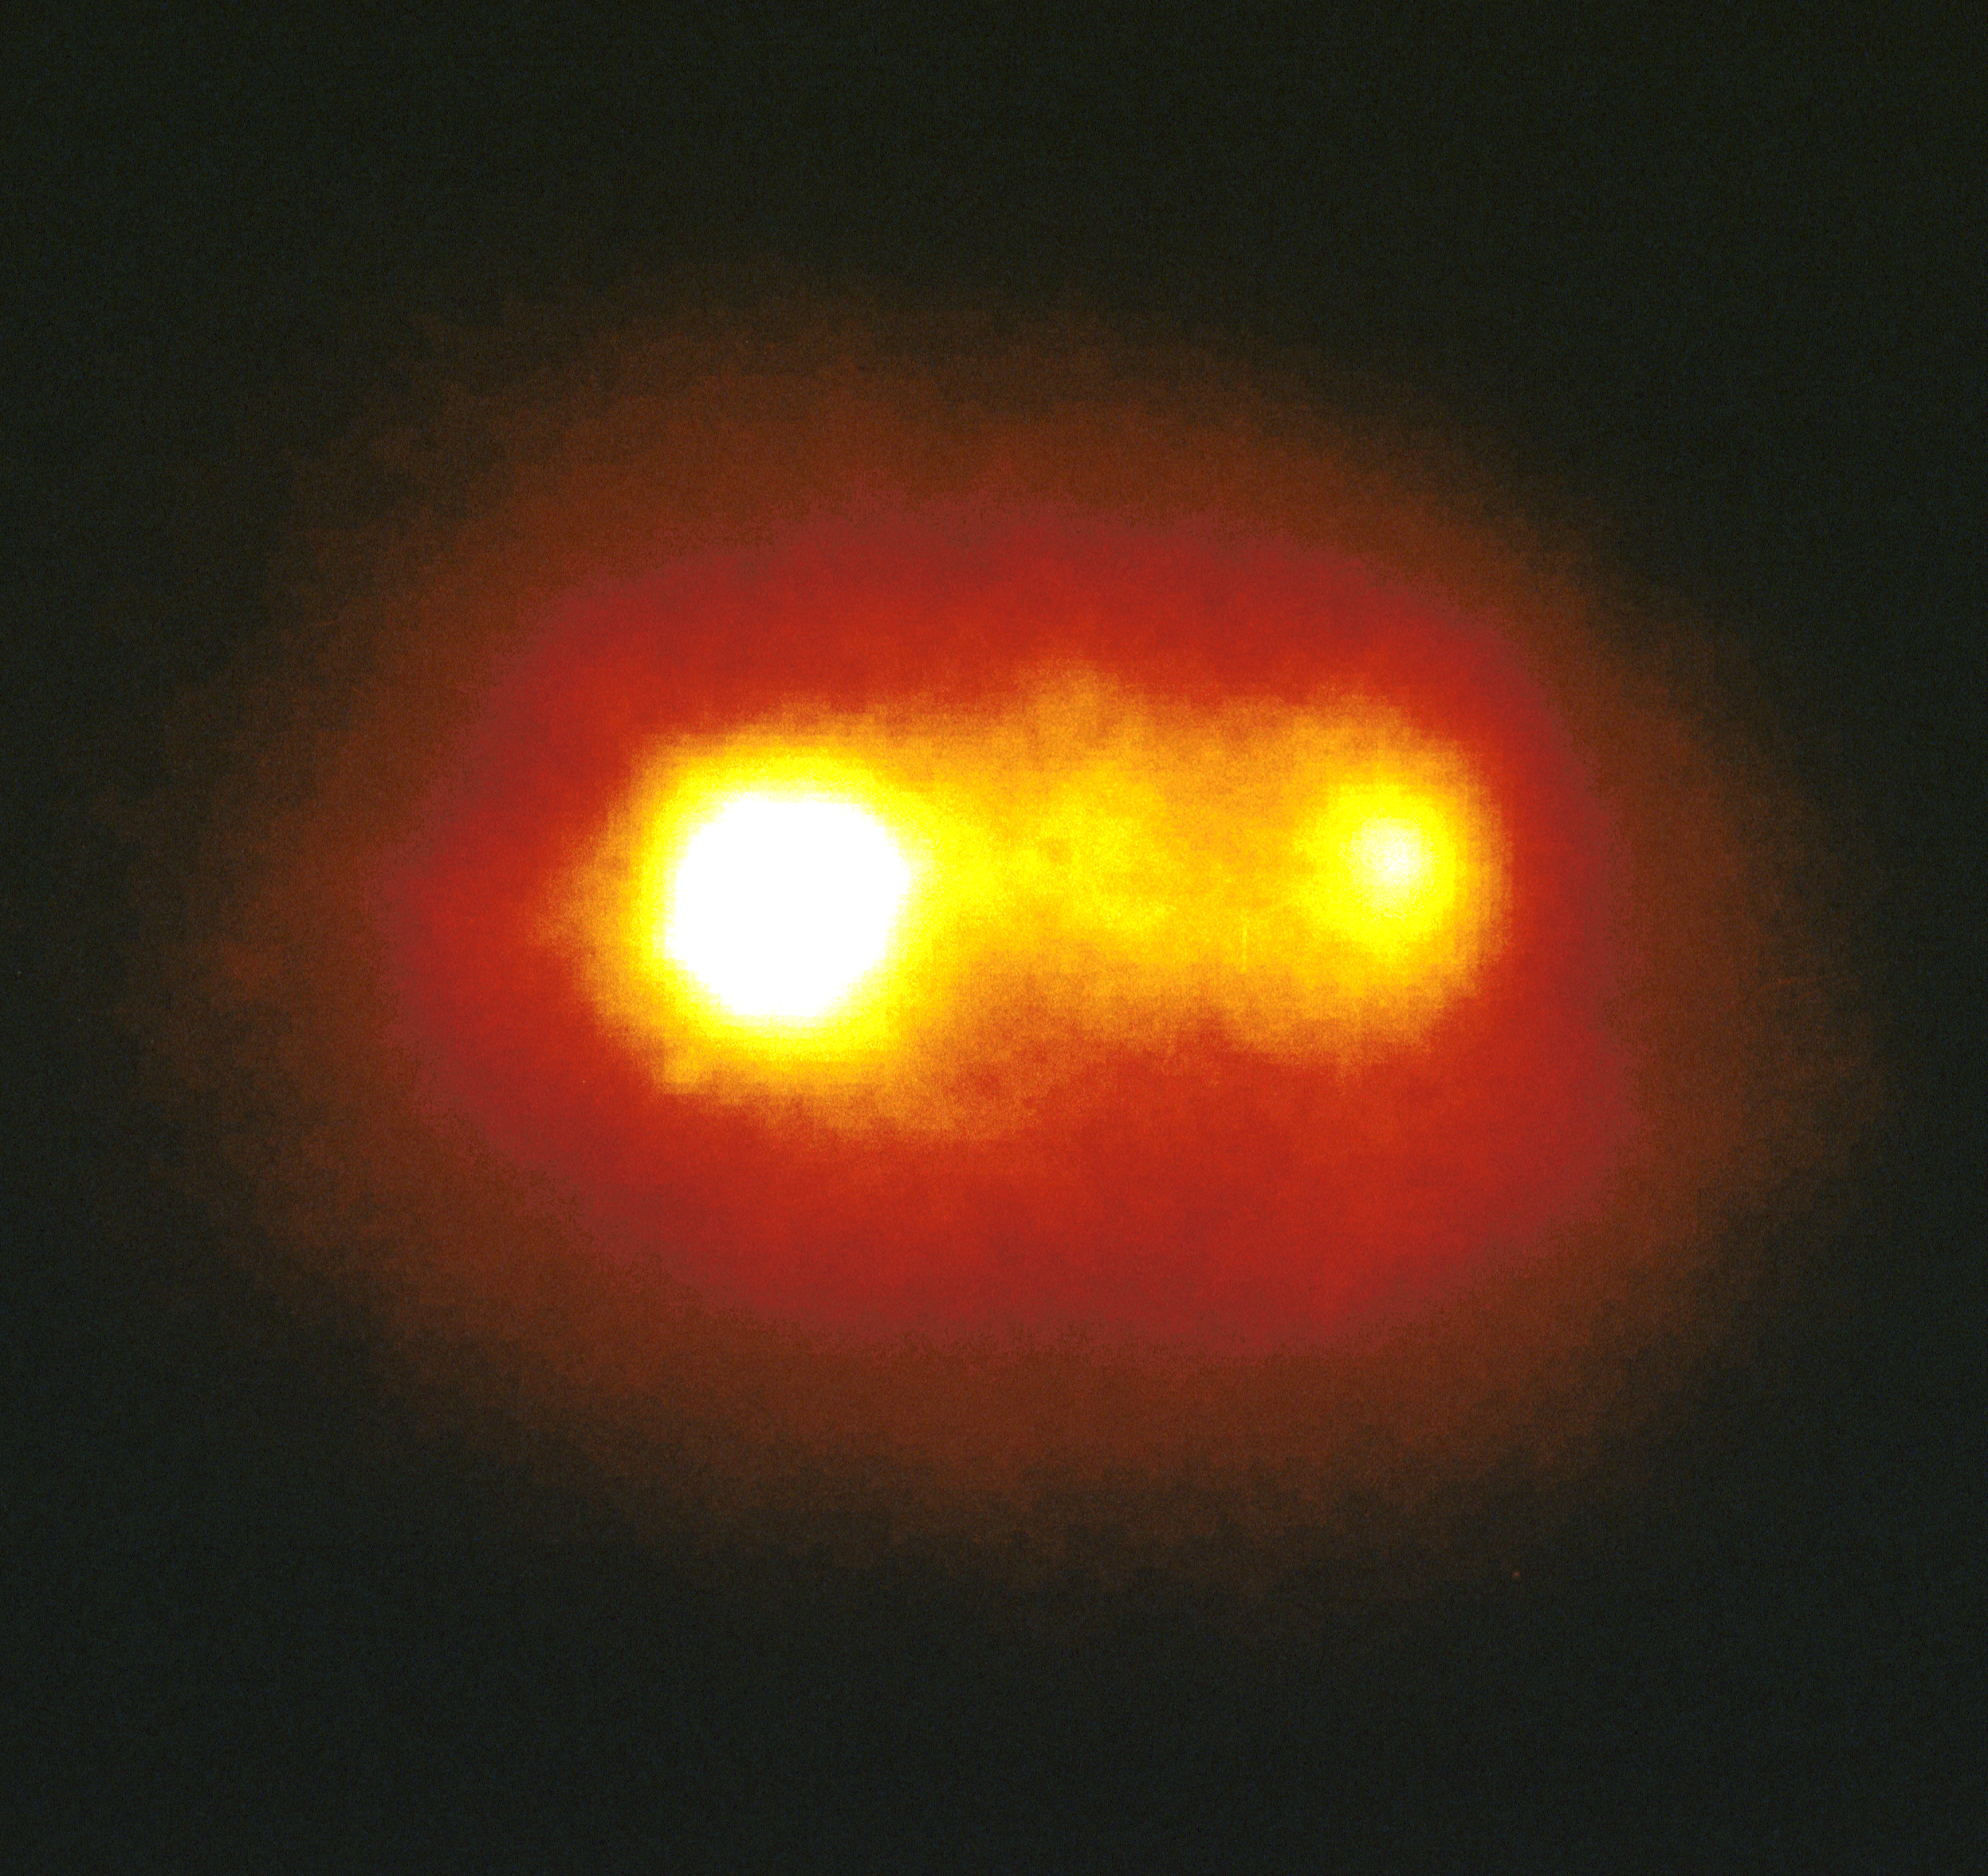

A double Nucleus in an active galaxy

A NASA/ESA Hubble Space Telescope image of the core of the Seyfert galaxy Markarian 315 reveals two nuclei located approximately 6,000light-years apart. (Seyfert galaxies are a class of spiral galaxy with extremely bright nuclei that are thought to be powered by massive black holes accreting matter.)

The brighter member of the pair is the energetic core of the galaxy which probably contains a black hole. The fainter companion is considered to be the core of a galaxy in the process of merging with Markarian 315.

Credit: J. MacKenty (STScl), and NASA/ESA.